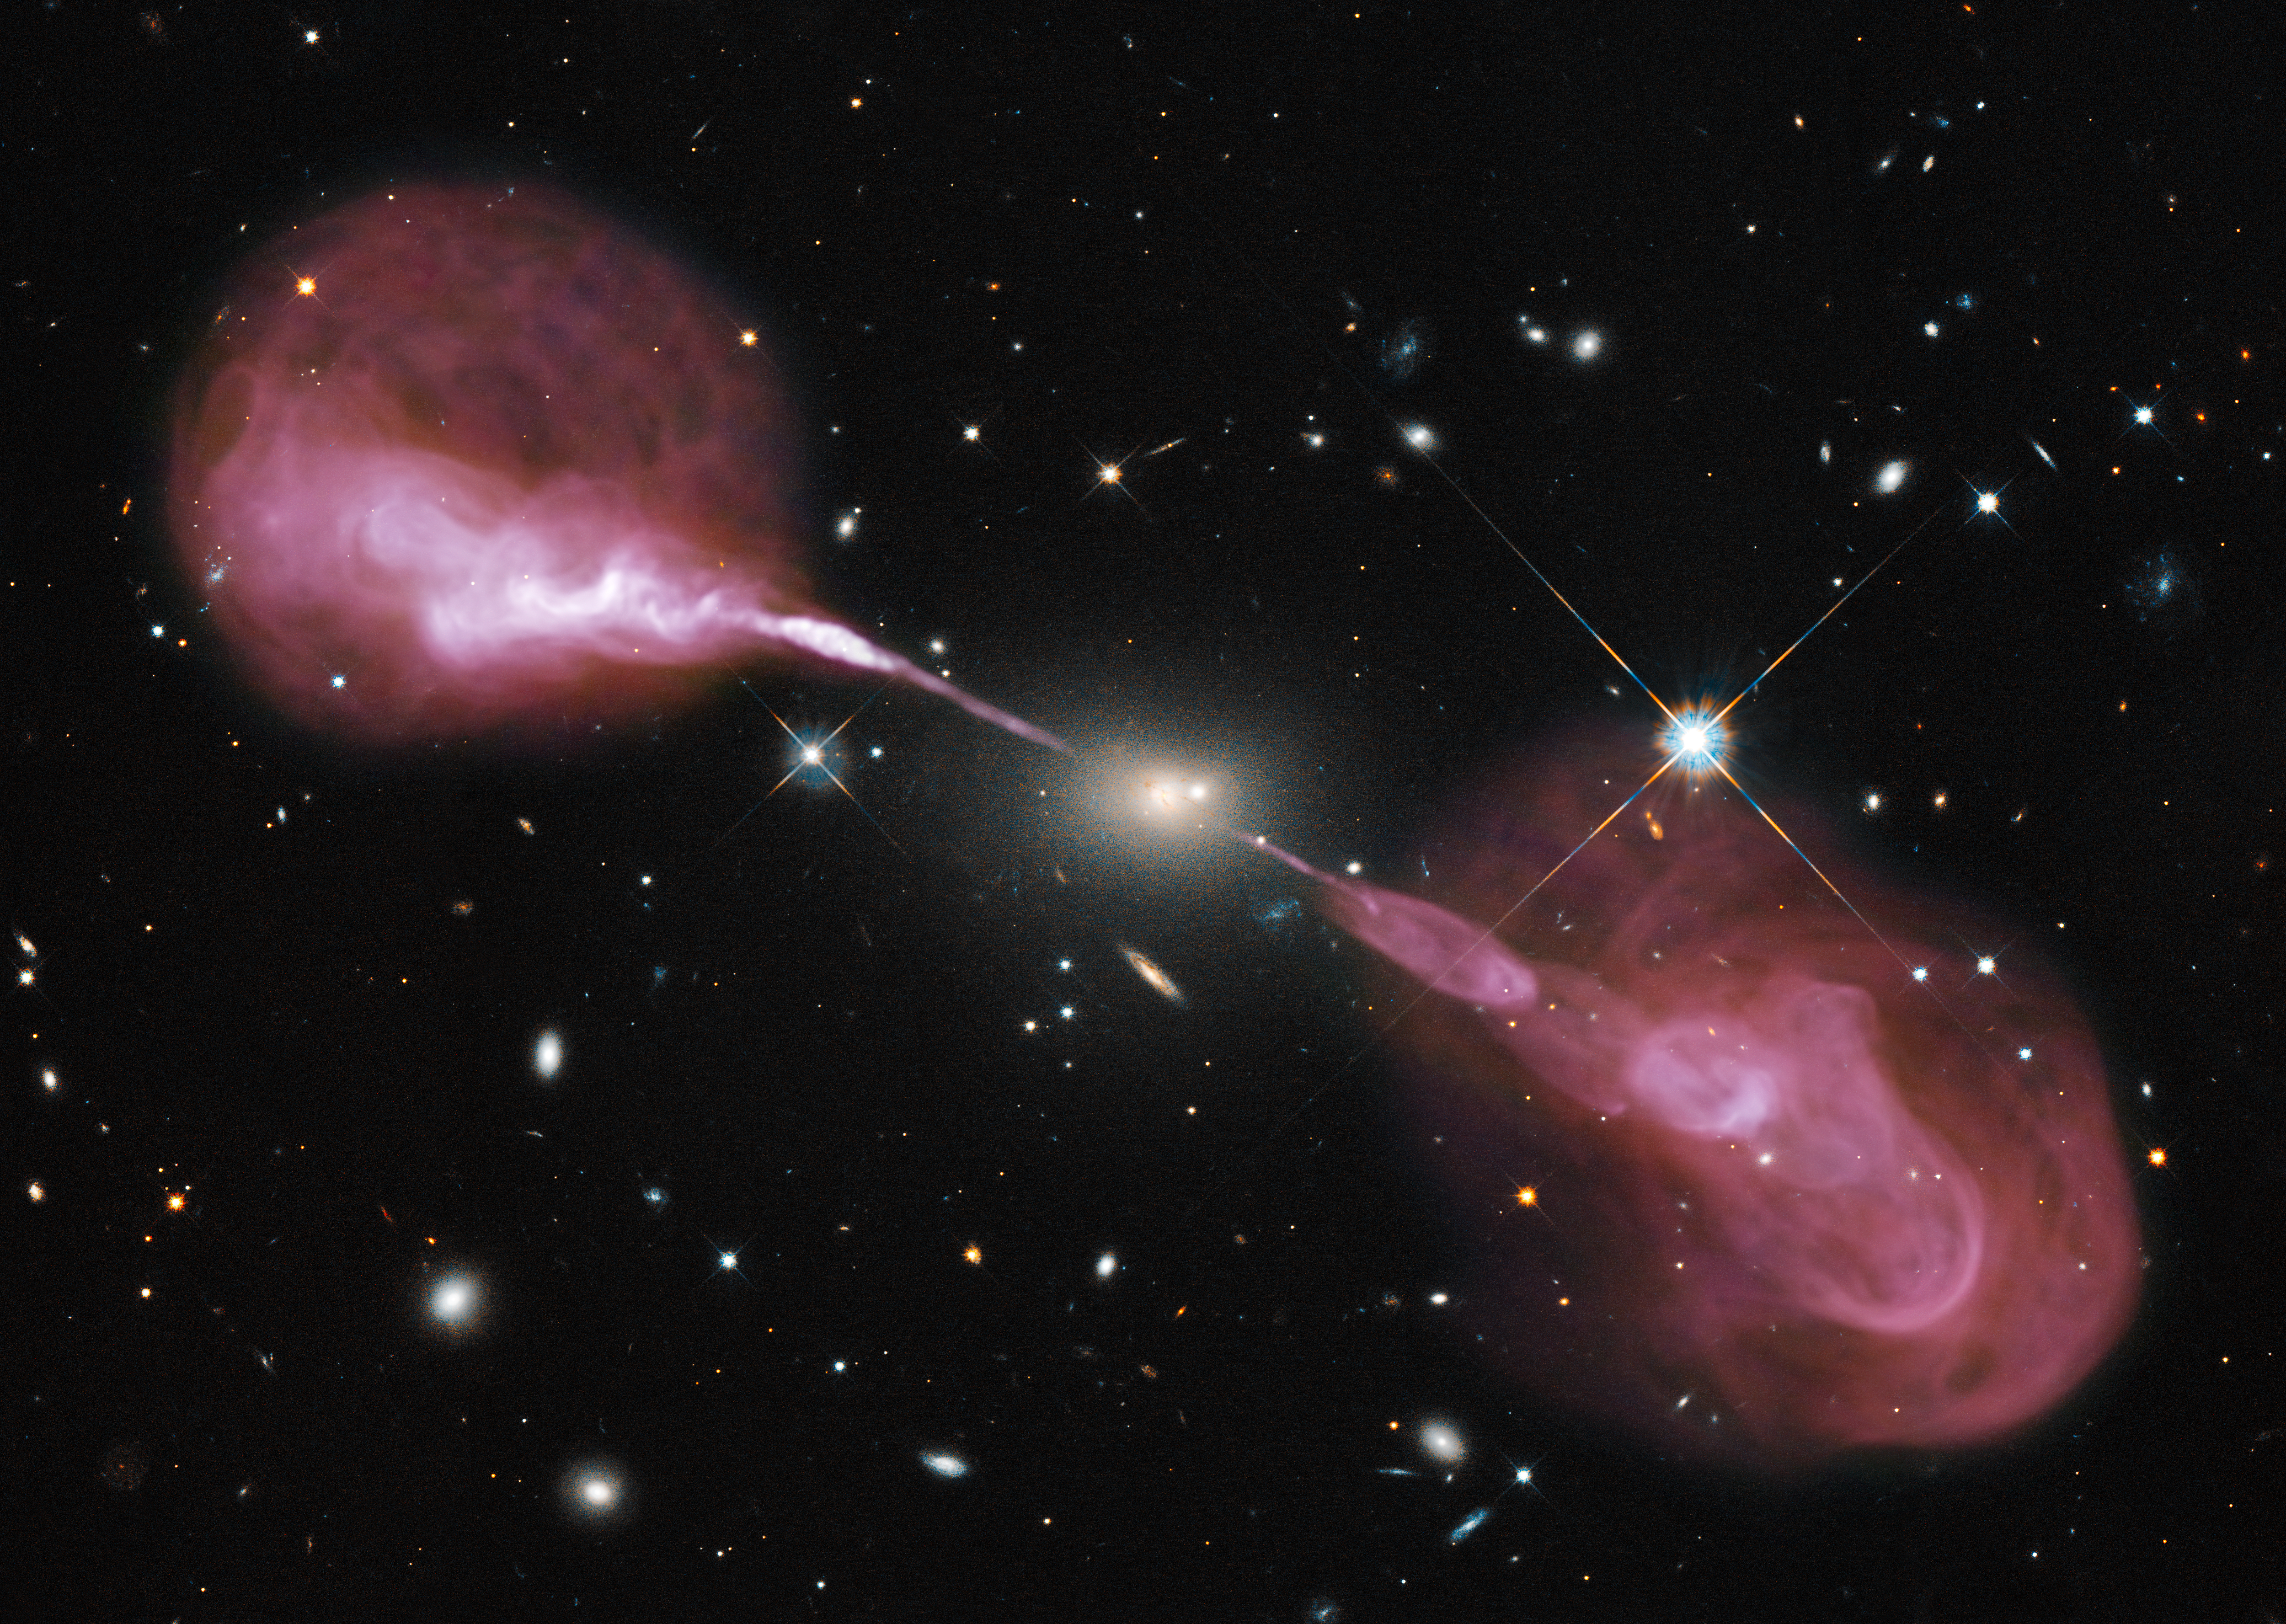

A multi-wavelength view of radio galaxy Hercules A

Spectacular jets powered by the gravitational energy of a supermassive black hole in the core of the elliptical galaxy Hercules A illustrate the combined imaging power of two of astronomy's cutting-edge tools, the Hubble Space Telescope's Wide Field Camera 3, and the recently upgraded Karl G. Jansky Very Large Array (VLA) radio telescope in New Mexico.

Some two billion light-years away, the yellowish elliptical galaxy in the centre of the image appears quite ordinary as seen by Hubble in visible wavelengths of light. The galaxy is roughly 1000 times more massive than the Milky Way and harbors a 2.5-billion-solar-mass central black hole that is 1000 times more massive than the black hole in the Milky Way. But the innocuous-looking galaxy, also known as 3C 348, has long been known as the brightest radio-emitting object in the constellation Hercules. Emitting nearly a billion times more power in radio wavelengths than our Sun, the galaxy is one of the brightest extragalactic radio sources in the entire sky.

The VLA radio data reveal enormous, optically invisible jets that, at one-and-a-half million light-years wide, dwarf the visible galaxy from which they emerge. The jets are very-high-energy plasma beams, subatomic particles and magnetic fields shot at nearly the speed of light from the vicinity of the black hole. The outer portions of both jets show unusual ring-like structures suggesting a history of multiple outbursts from the supermassive black hole at the centre of the galaxy.

The innermost parts of the jets are not visible because of the extreme velocity of the material, which causes relativistic effects that beam the light away from us. Far from the galaxy, the jets become unstable and break up into the rings and wisps.

The entire radio source is surrounded by a very hot, X-ray-emitting cloud of gas, not seen in this optical-radio composite.

Hubble's view of the field also shows a companion elliptical galaxy very close to the centre of the optical-radio source, which may be merging with the central galaxy. Several other elliptical and spiral galaxies that are visible in the Hubble data may be members of a cluster of galaxies. Hercules A is by far the brightest and most massive galaxy in the cluster.

Credit: NASA, ESA, S. Baum and C. O'Dea (RIT), R. Perley and W. Cotton (NRAO/AUI/NSF), and the Hubble Heritage Team (STScI/AURA)